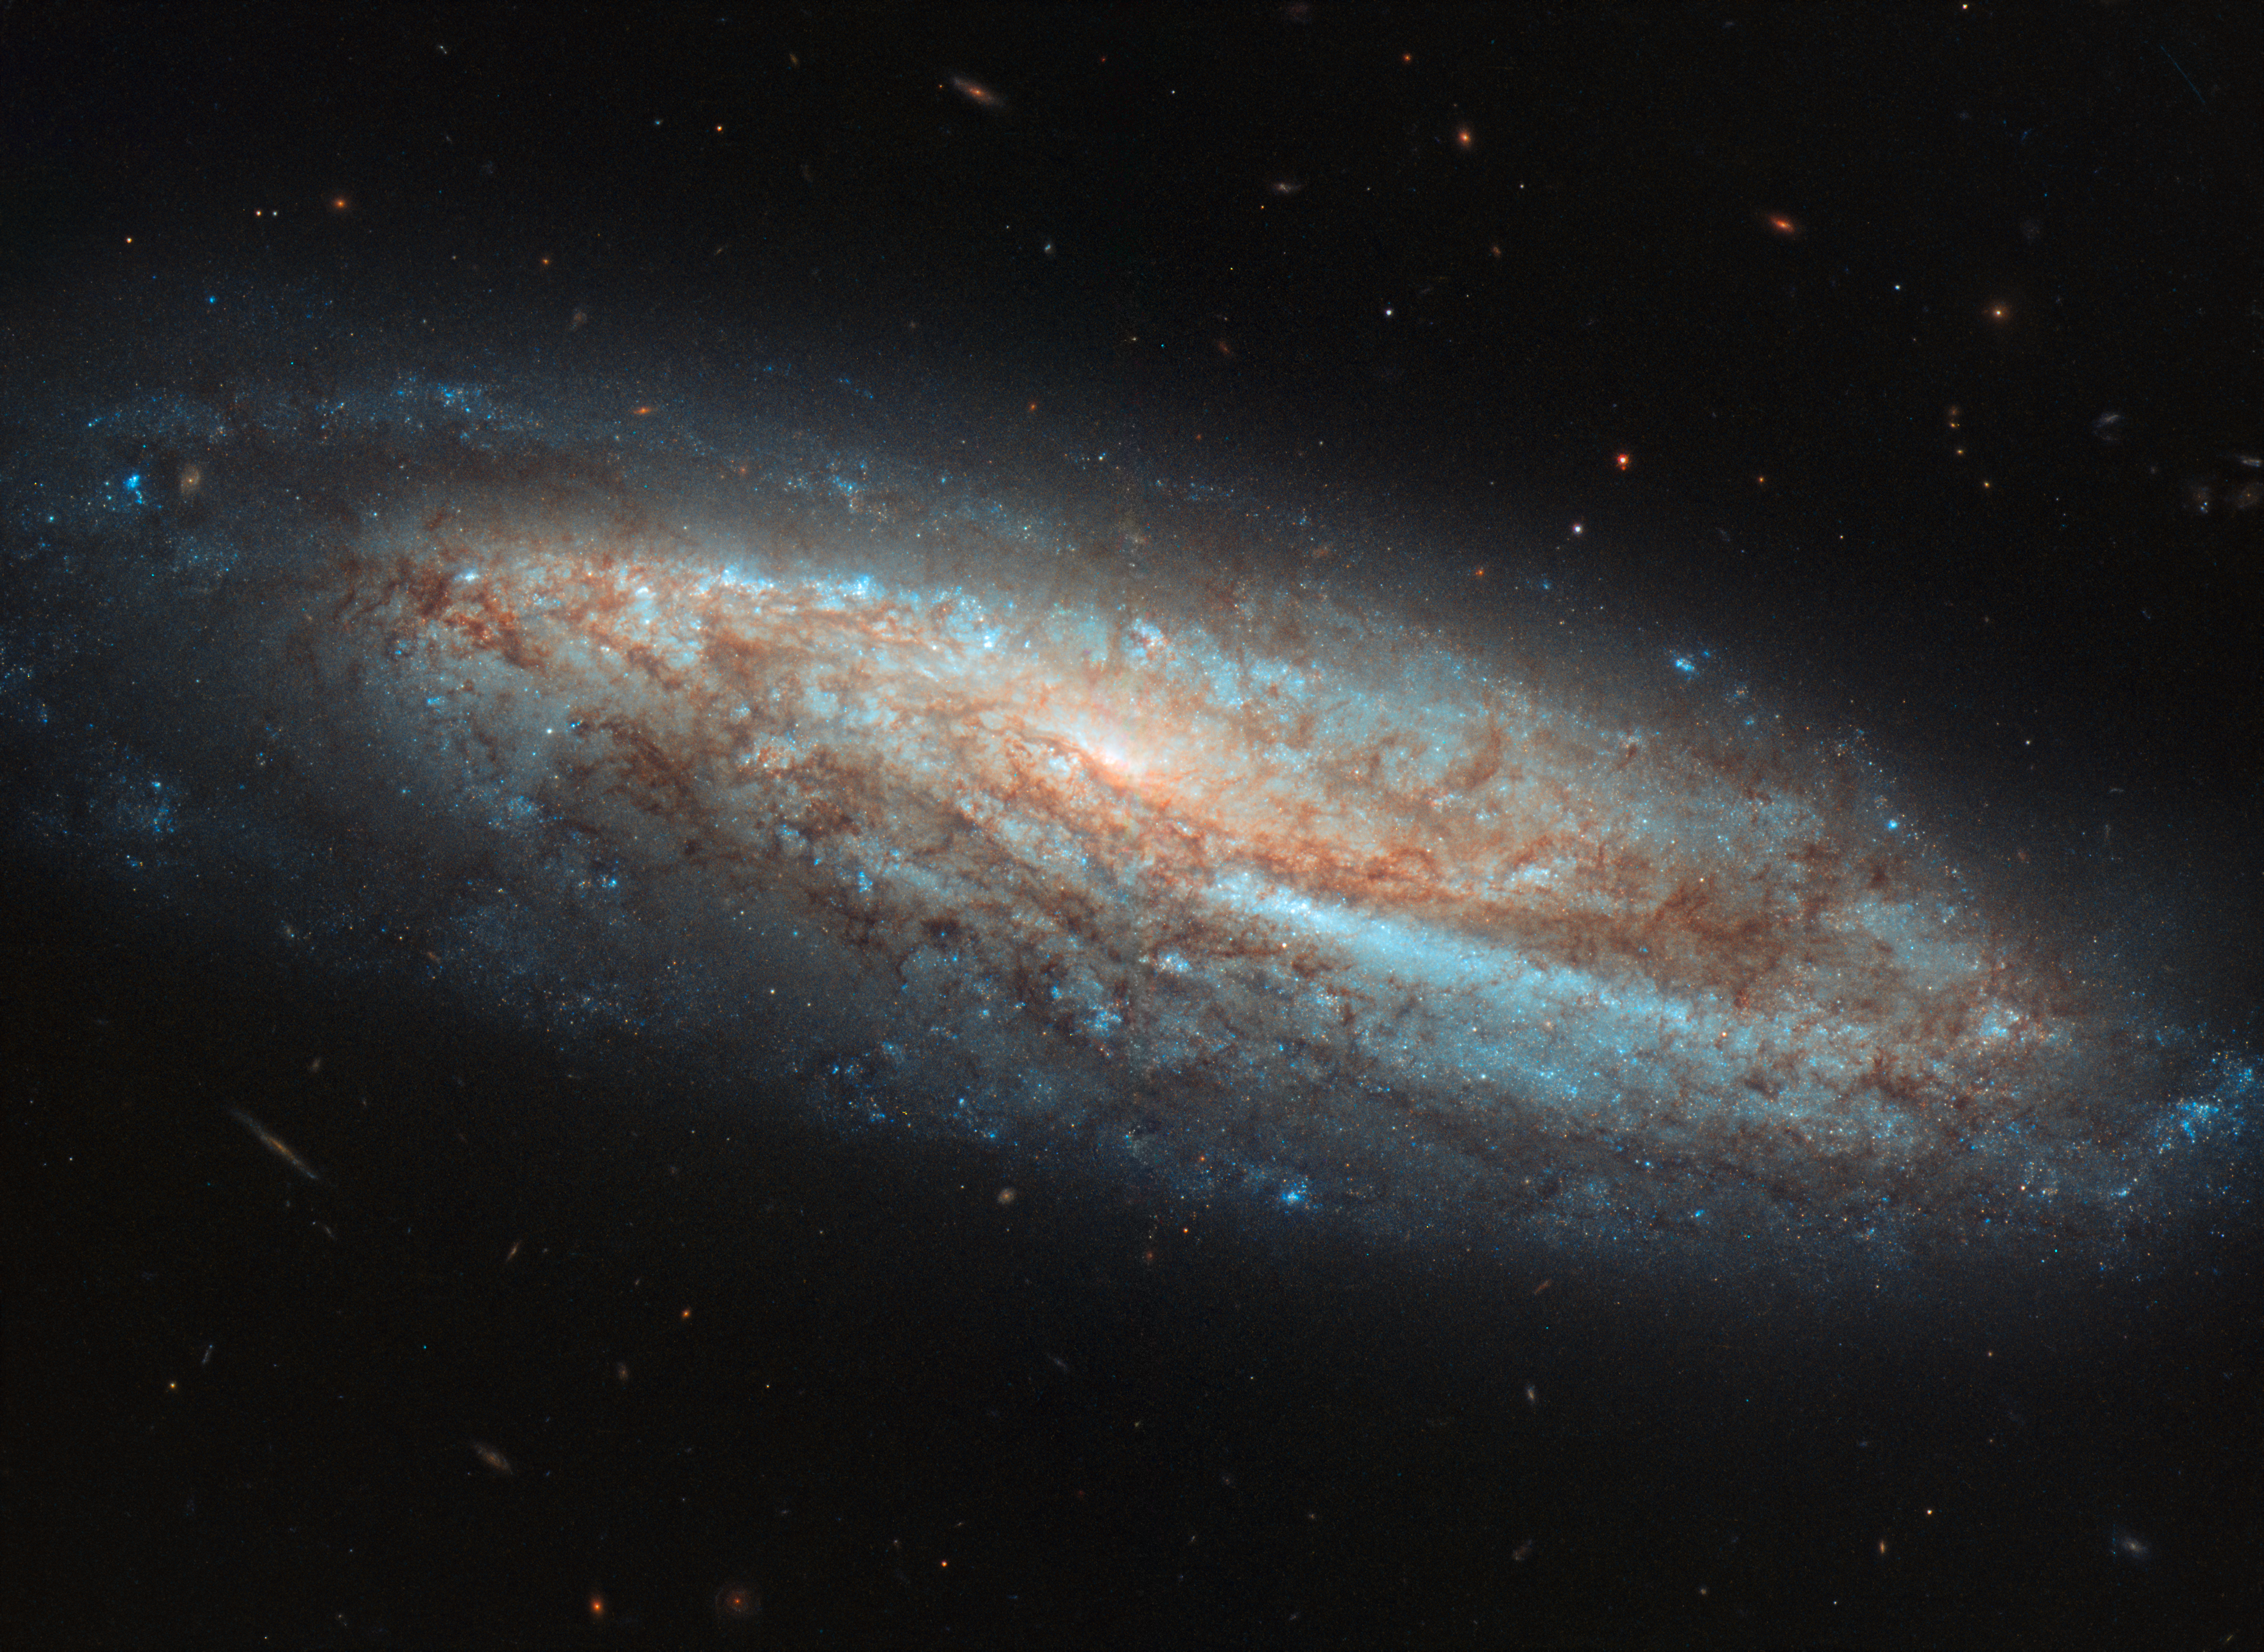

Bars and Baby Stars

The galaxy depicted in this Picture of the Week is a barred spiral known as NGC 7541, seen here as viewed by the NASA/ESA Hubble Space Telescope, in the constellation of Pisces (The Fishes).

A barred spiral is a galaxy with whirling, pinwheeling, spiral arms, and a bright centre that is intersected by a bar of gas and stars. This bar cuts directly through the galaxy’s central region, and is thought to invigorate the region somewhat, sparking activity and fuelling myriad processes that may otherwise have never occurred or have previously ground to a halt (star formation and active galactic nuclei being key examples). We think bars exist in up to two-thirds of all spiral galaxies, including our own home, the Milky Way.

NGC 7541 is actually observed to have a higher-than-usual star formation rate, adding weight to the theory that spiral bars act as stellar nurseries, corralling and funnelling inwards the material and fuel needed to create and nurture new baby stars. Along with its nearby companion NGC 7537, the galaxy makes up a pair of galaxies located about 110 million light-years away from us.

Credit: ESA/Hubble & NASA, A. Riess et al.